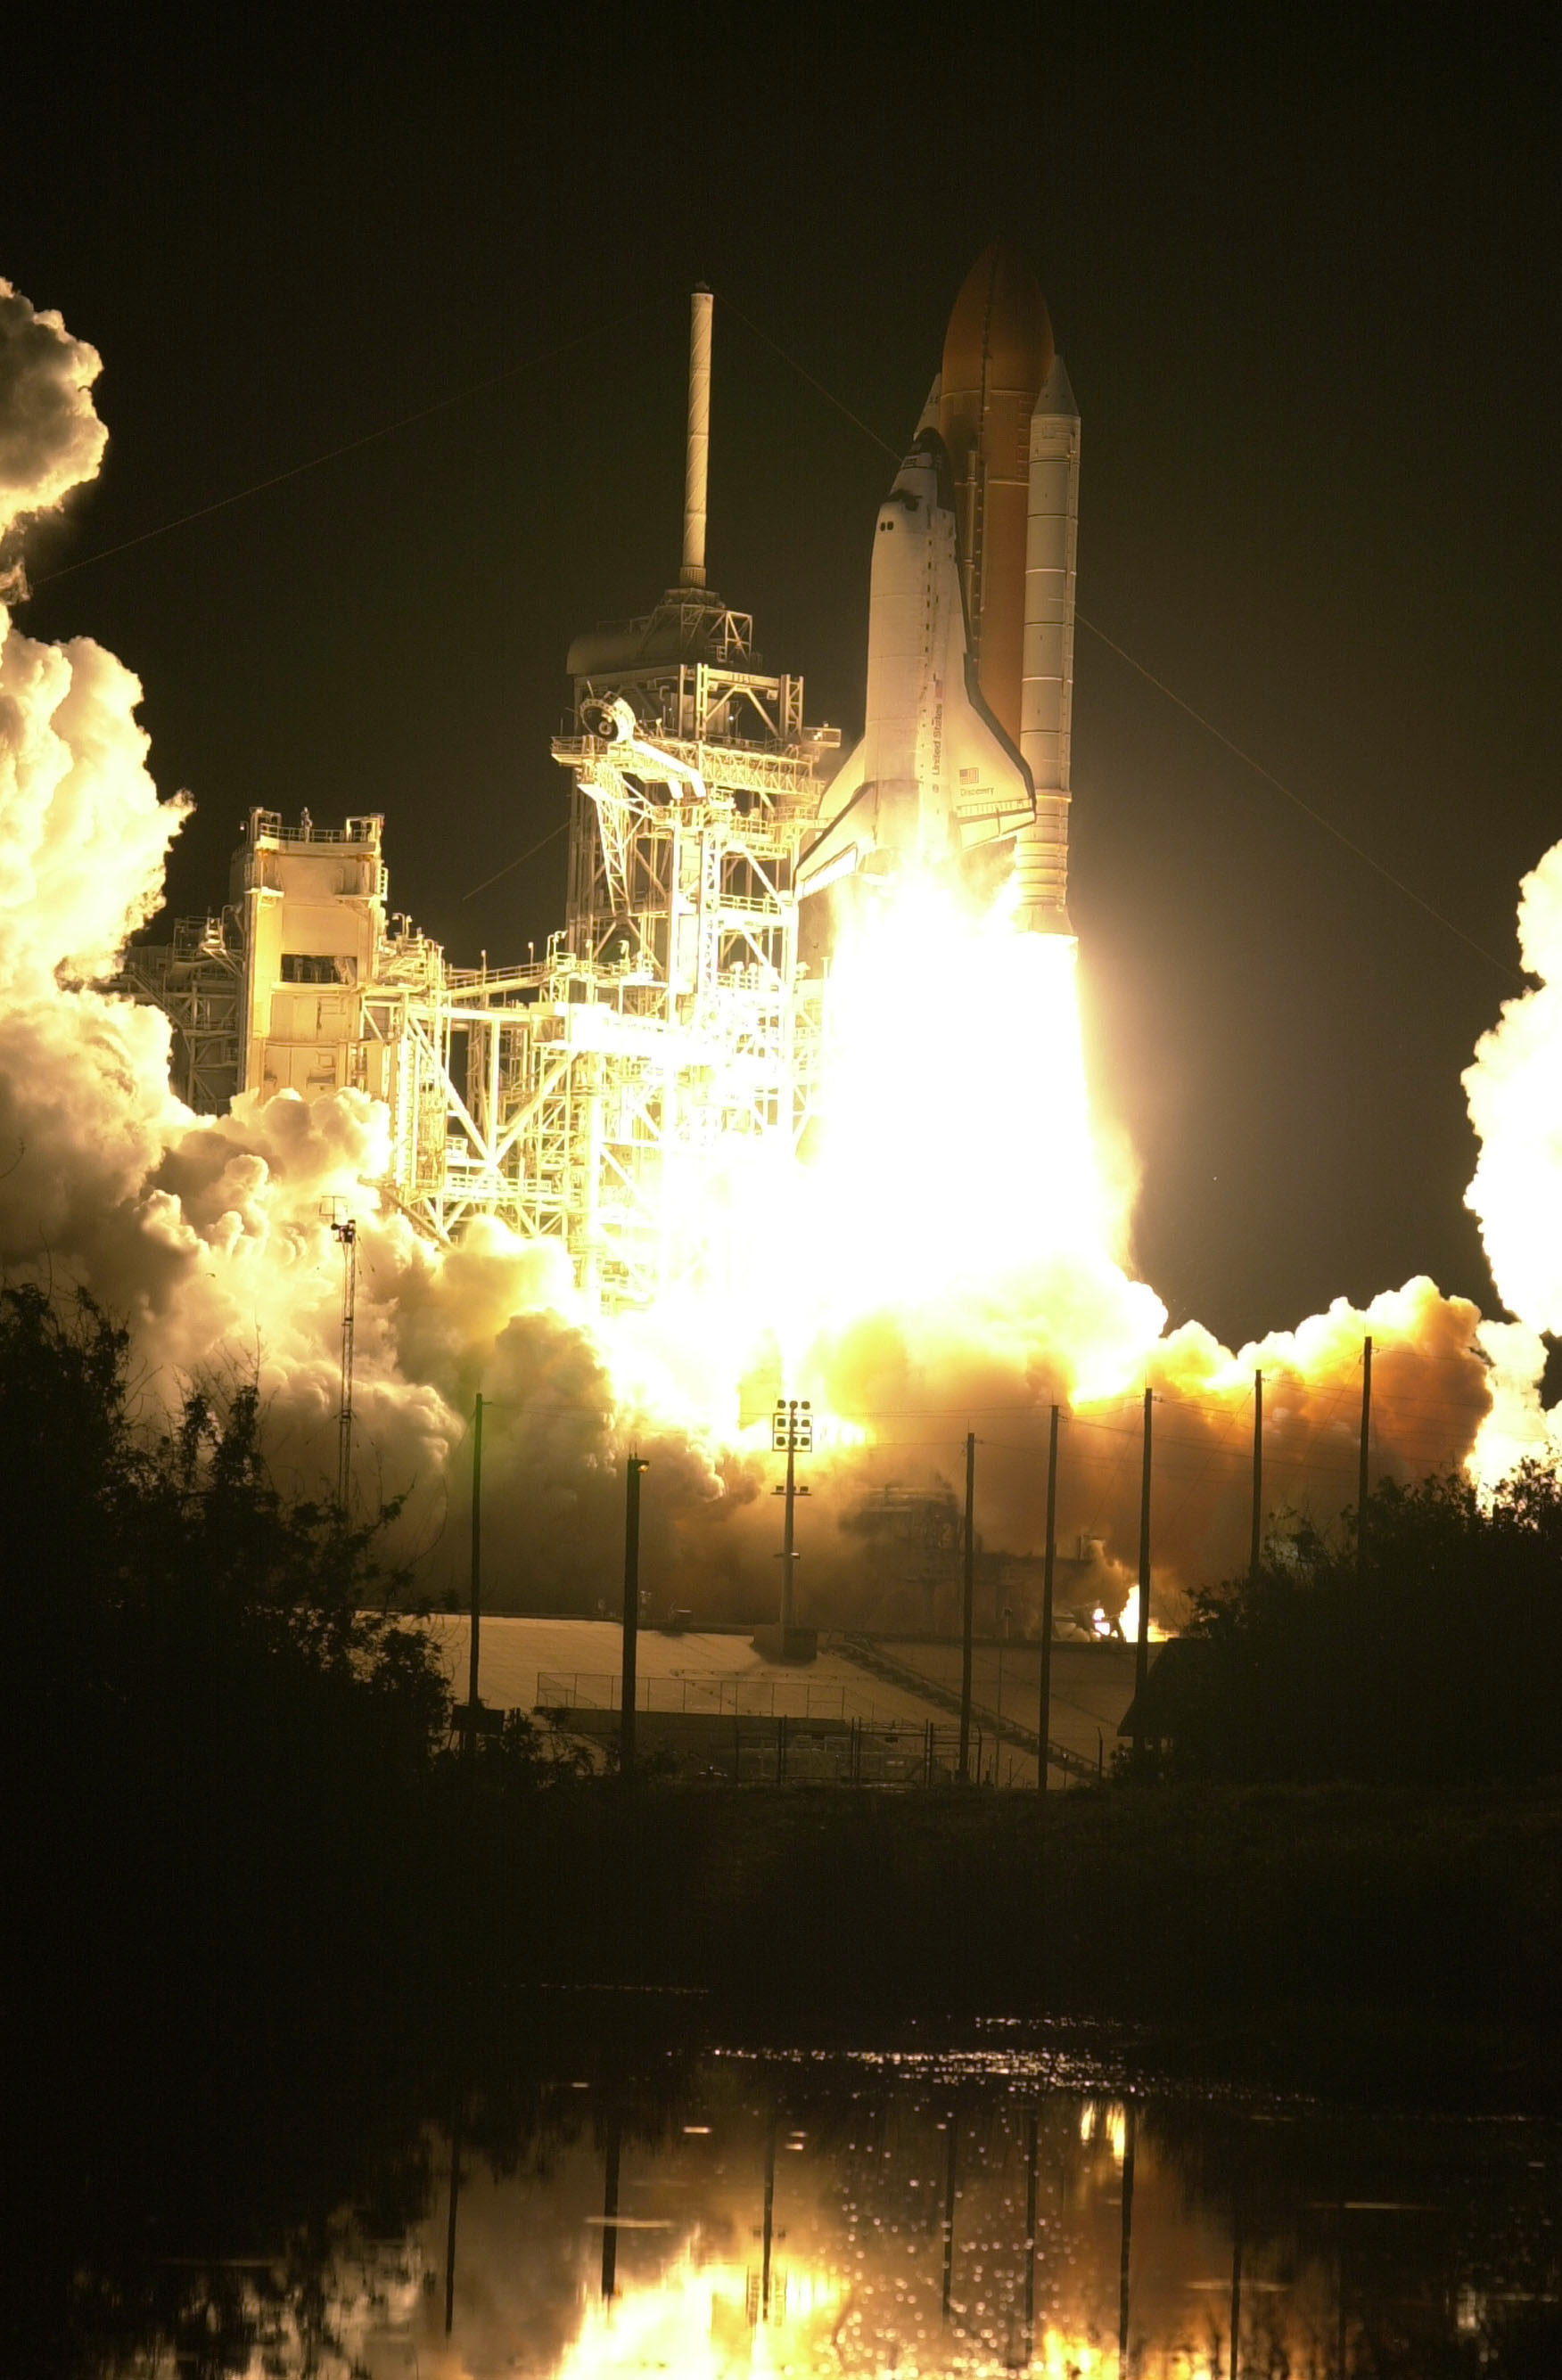

SM3A: Discovery Liftoff

The clear night at the lakeside created a fantastic setting for the liftoff of the Space Shuttle Discovery.

Credit: NASA/ESA